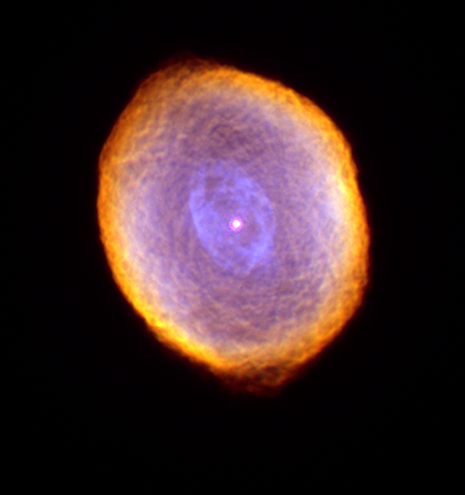

The Spirograph Nebula

Glowing like a multi-faceted jewel, the planetary nebula IC 418 lies about 2000 light-years from Earth in the constellation Lepus. In this picture, the Hubble telescope reveals some remarkable textures weaving through the nebula. Their origin, however, is still uncertain.

Credit: NASA/ESA and The Hubble Heritage Team (STScI/AURA)